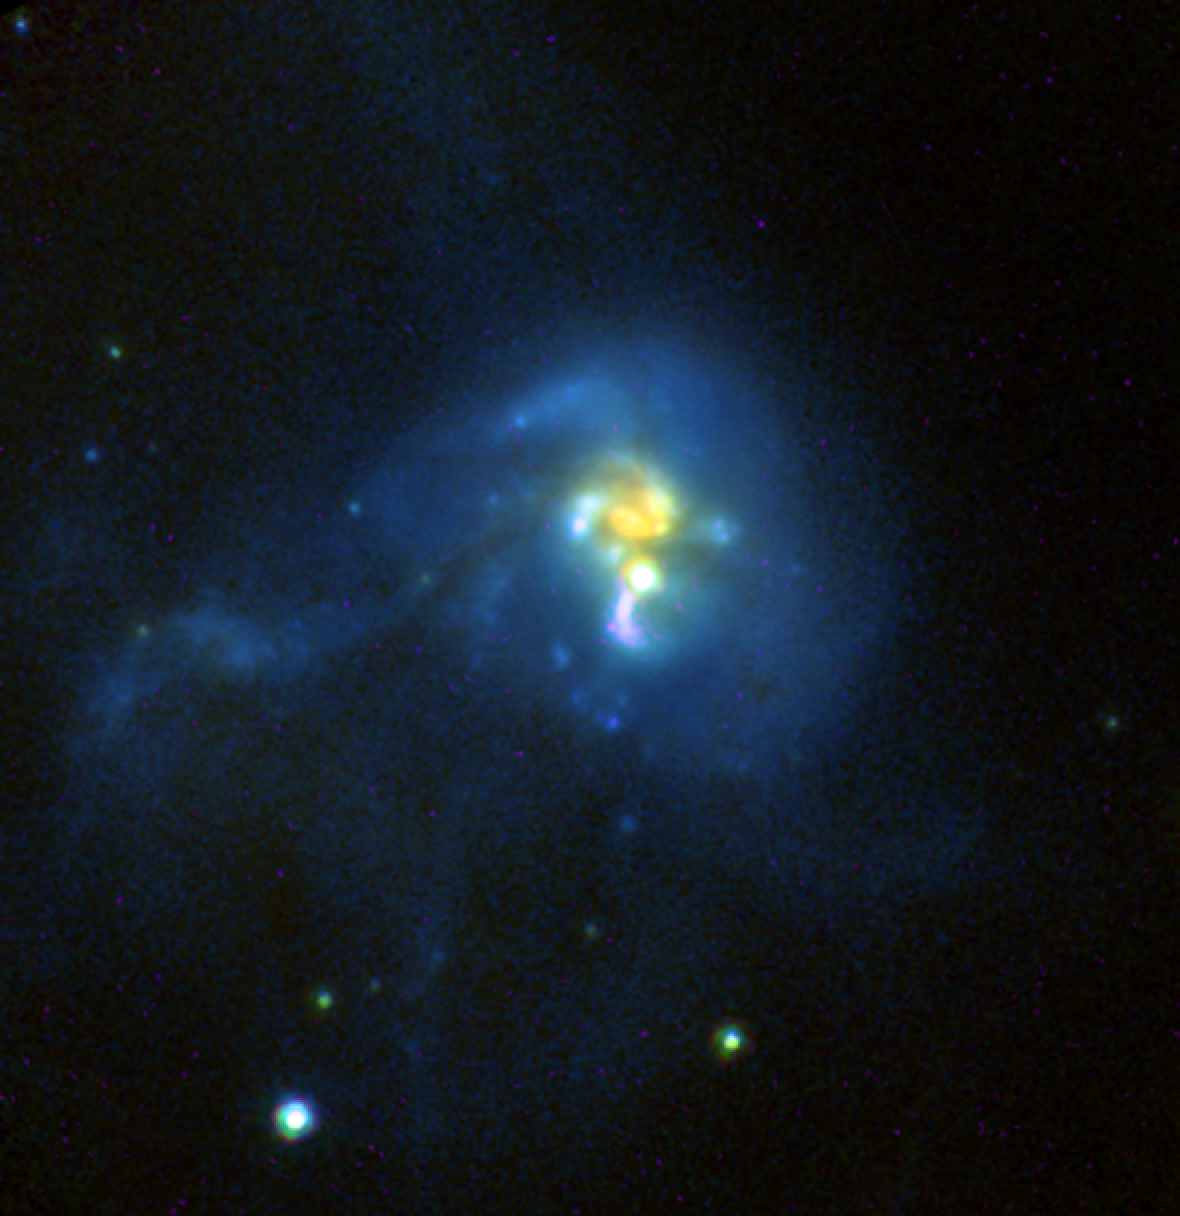

Hubble Provides 'One-Two Punch' to See Birth of Stars in Galactic Wreckage

Two powerful cameras aboard NASA/ESA Hubble Space Telescope teamed up to capture the final stages in the grand assembly of galaxies.

The photograph, taken by the Advanced Camera for Surveys (ACS) and the revived Near Infrared Camera and Multi-Object Spectrometer (NICMOS), shows a tumultuous collision between four galaxies located 1 billion light-years from Earth. The galactic car wreck is creating a torrent of new stars.

The tangled up galaxies, called IRAS 19297-0406, are crammed together in the center of the picture. IRAS 19297-0406 is part of a class of galaxies known as ultraluminous infrared galaxies (ULIRGs). ULIRGs are considered the progenitors of massive elliptical galaxies.

ULIRGs glow fiercely in infrared light, appearing 100 times brighter than our Milky Way Galaxy. The large amount of dust in these galaxies produces the brilliant infrared glow. The dust is generated by a firestorm of star birth triggered by the collisions.

IRAS 19297-0406 is producing about 200 new Sun-like stars every year - about 100 times more stars than our Milky Way creates. The hotbed of this star formation is the central region [the yellow objects]. This area is swamped in the dust created by the flurry of star formation.

The bright blue material surrounding the central region corresponds to the ultraviolet glow of new stars. The ultraviolet light is not obscured by dust. Astronomers believe that this area is creating fewer new stars and therefore not as much dust.

The colliding system [yellow and blue regions] has a diameter of about 30,000 light-years, or about half the size of the Milky Way. The tail [faint blue material at left] extends out for another 20,000 light-years.

Astronomers used both cameras to witness the flocks of new stars that are forming from the galactic wreckage. NICMOS penetrated the dusty veil that masks the intense star birth in the central region. ACS captured the visible starlight of the colliding system's blue outer region.

IRAS 19297-0406 may be similar to the so-called Hickson compact groups - clusters of at least four galaxies in a tight configuration that are isolated from other galaxies. The galaxies are so close together that they lose energy from the relentless pull of gravity. Eventually, they fall into each other and form one massive galaxy.

This color-composite image was made by combining photographs taken in near-infrared light with NICMOS and ultraviolet and visible light with ACS. The pictures were taken with these filters: the H-band and J-band on NICMOS; the V-band on the ACS wide-field camera; and the U-band on the ACS high-resolution camera. The images were taken on May 13 and 14.

Credit: NASA, the NICMOS Group (STScI, ESA), and the NICMOS Science Team (University of Arizona)